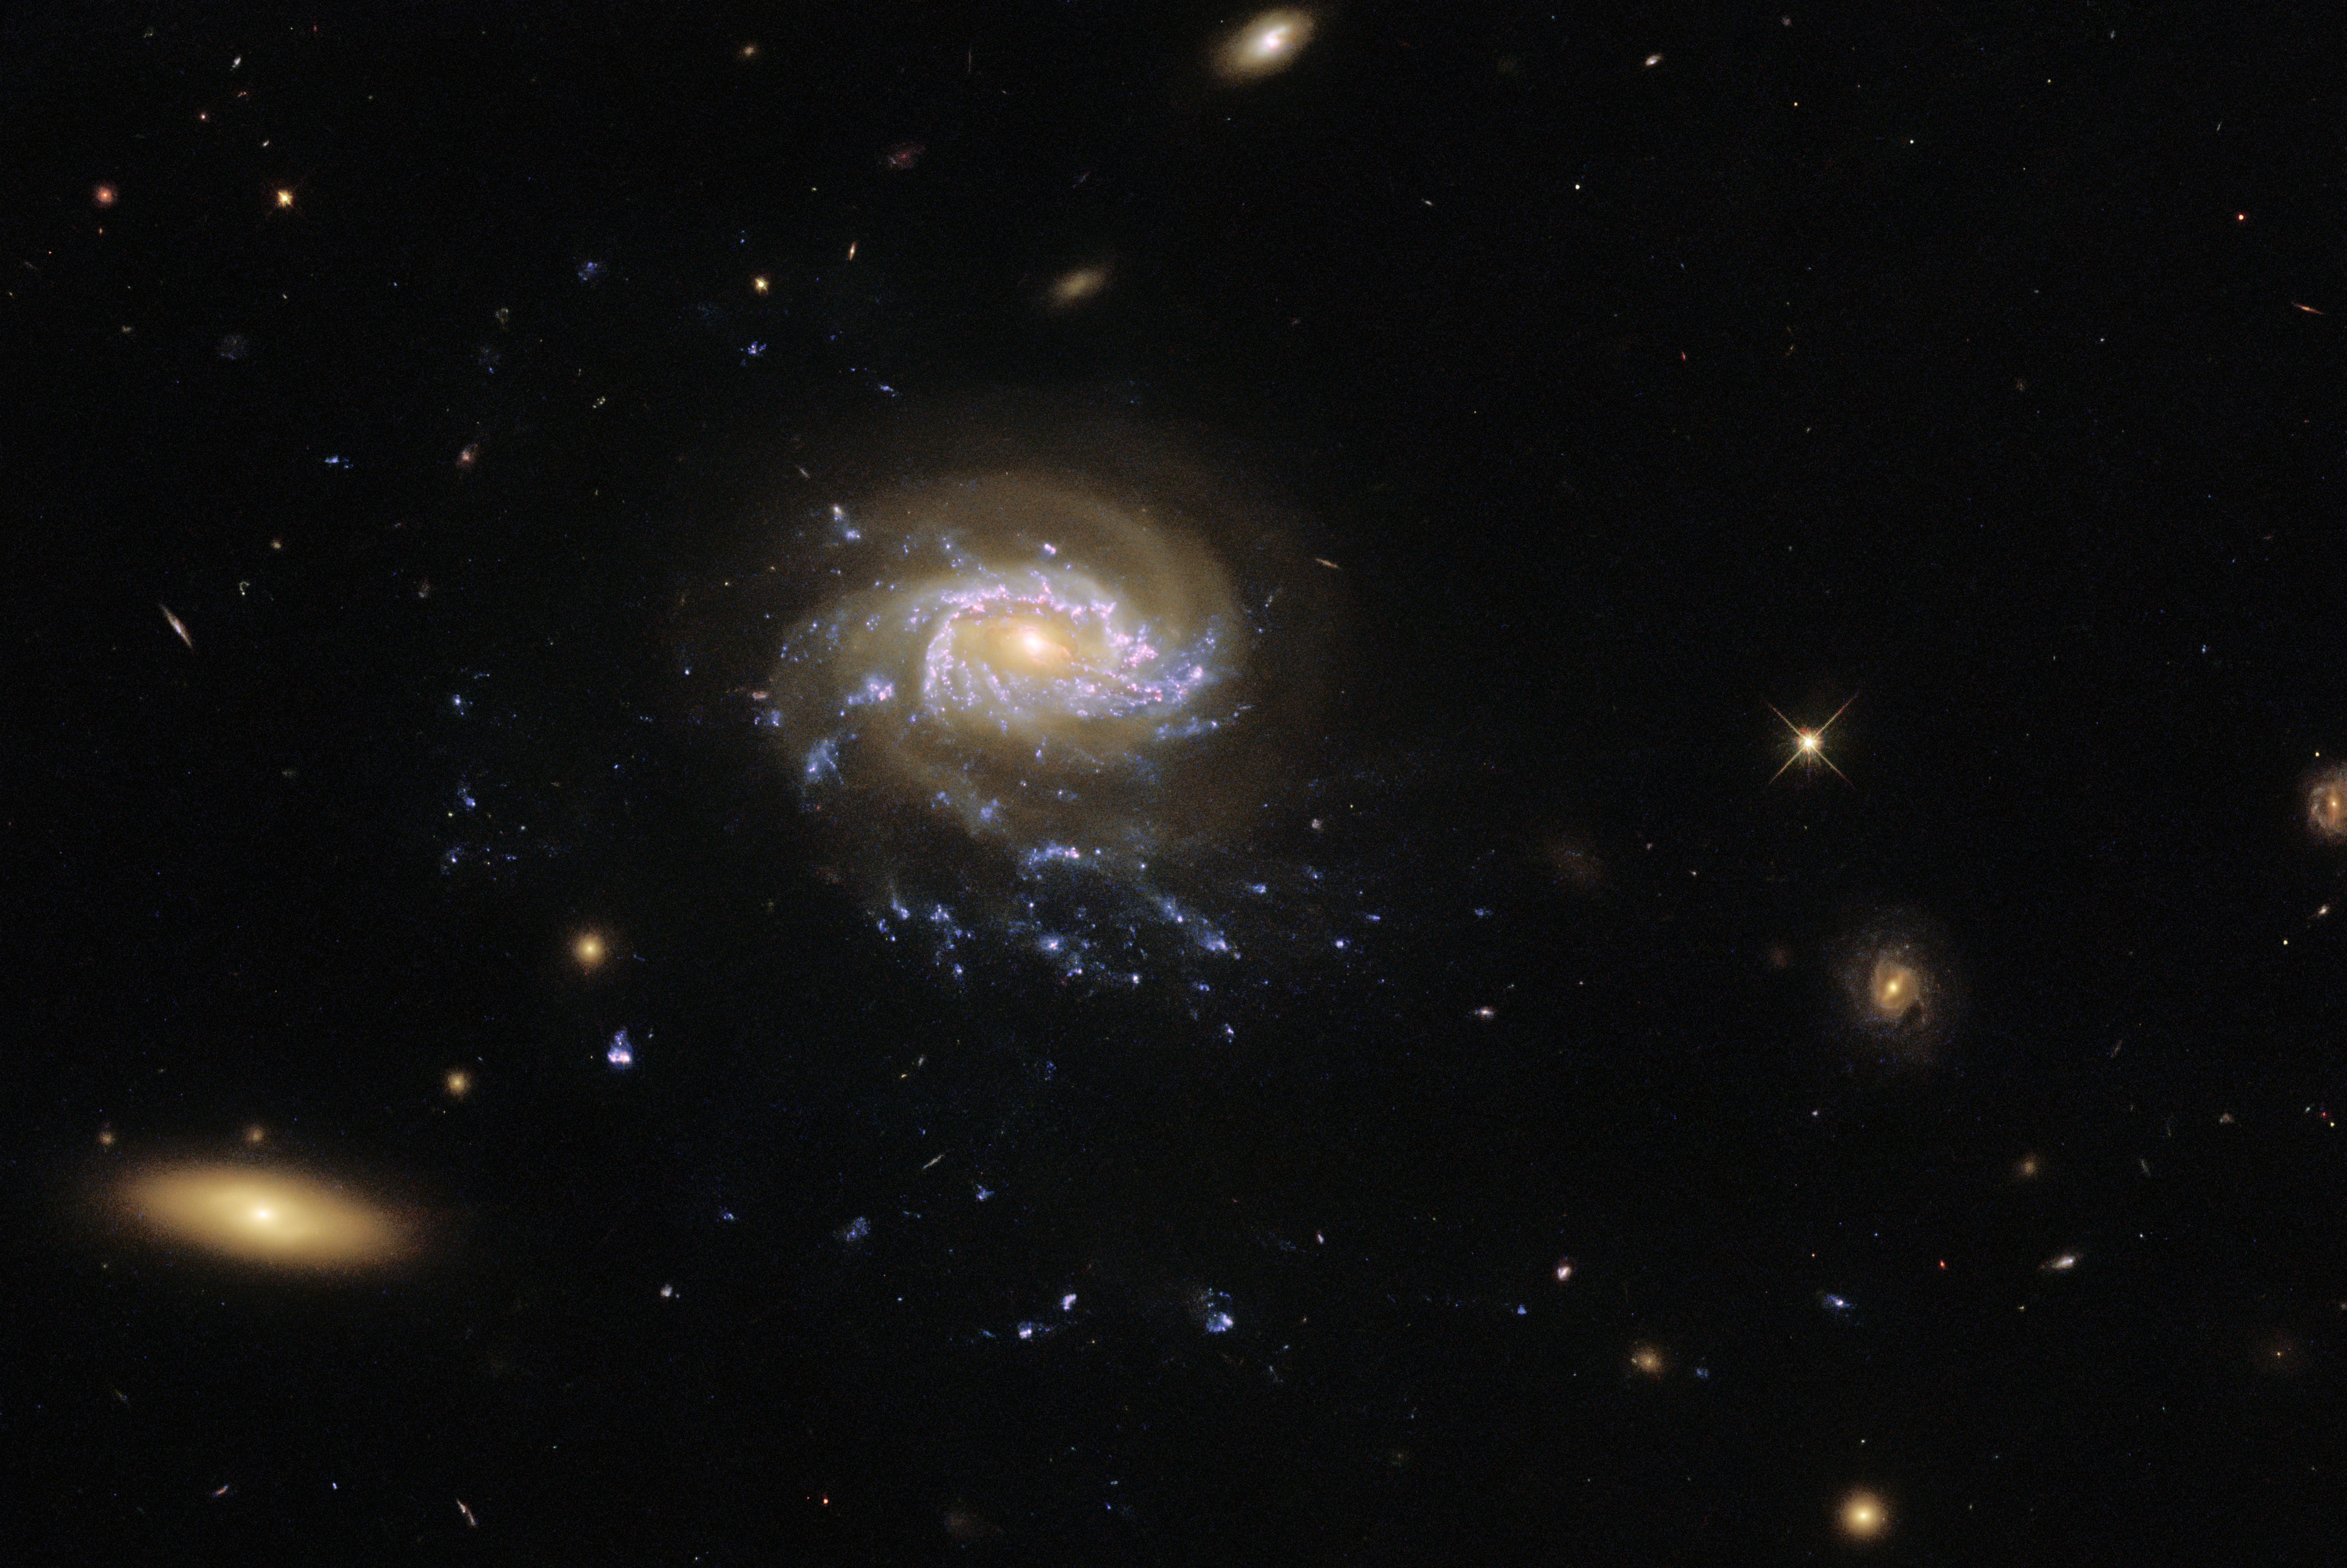

Galactic Seascape

A jellyfish galaxy with trailing tentacles of stars hangs in inky blackness in this image from the NASA/ESA Hubble Space Telescope. As Jellyfish galaxies move through intergalactic space they are slowly stripped of gas, which trails behind the galaxy in tendrils illuminated by clumps of star formation. These blue tendrils are visible drifting below the core of this galaxy, and give it its jellyfish-like appearance. This particular jellyfish galaxy — known as JO201 — lies in the constellation Cetus, which is named after a sea monster from ancient Greek mythology. This sea-monster-themed constellation adds to the nautical theme of this image.

The tendrils of jellyfish galaxies extend beyond the bright disc of the galaxy core. This particular observation comes from an investigation into the sizes, masses and ages of the clumps of star formation in the tendrils of jellyfish galaxies. Astronomers hope that this will provide a breakthrough in understanding the connection between ram-pressure stripping — the process that creates the tendrils of jellyfish galaxies — and star formation.

This galactic seascape was captured by Wide Field Camera 3 (WFC3), a versatile instrument that captures images at ultraviolet and visible wavelengths. WFC3 is the source of some of Hubble’s most spectacular images, from a view of Jupiter and Europa to a revisit to the Pillars of Creation.

Credit: ESA/Hubble & NASA, M. Gullieuszik and the GASP team